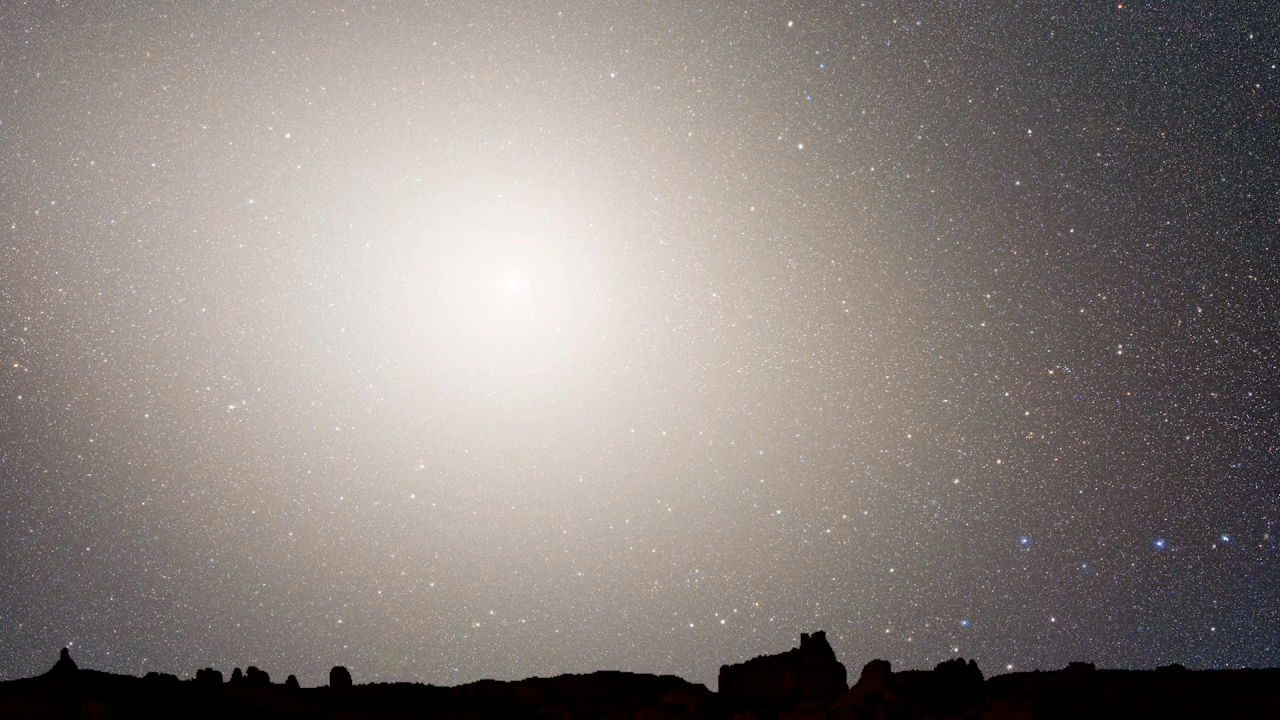

Screenshot of Hubblecast 55

Watch the Hubblecast episode 55 on this link.

Credit: NASA & ESA